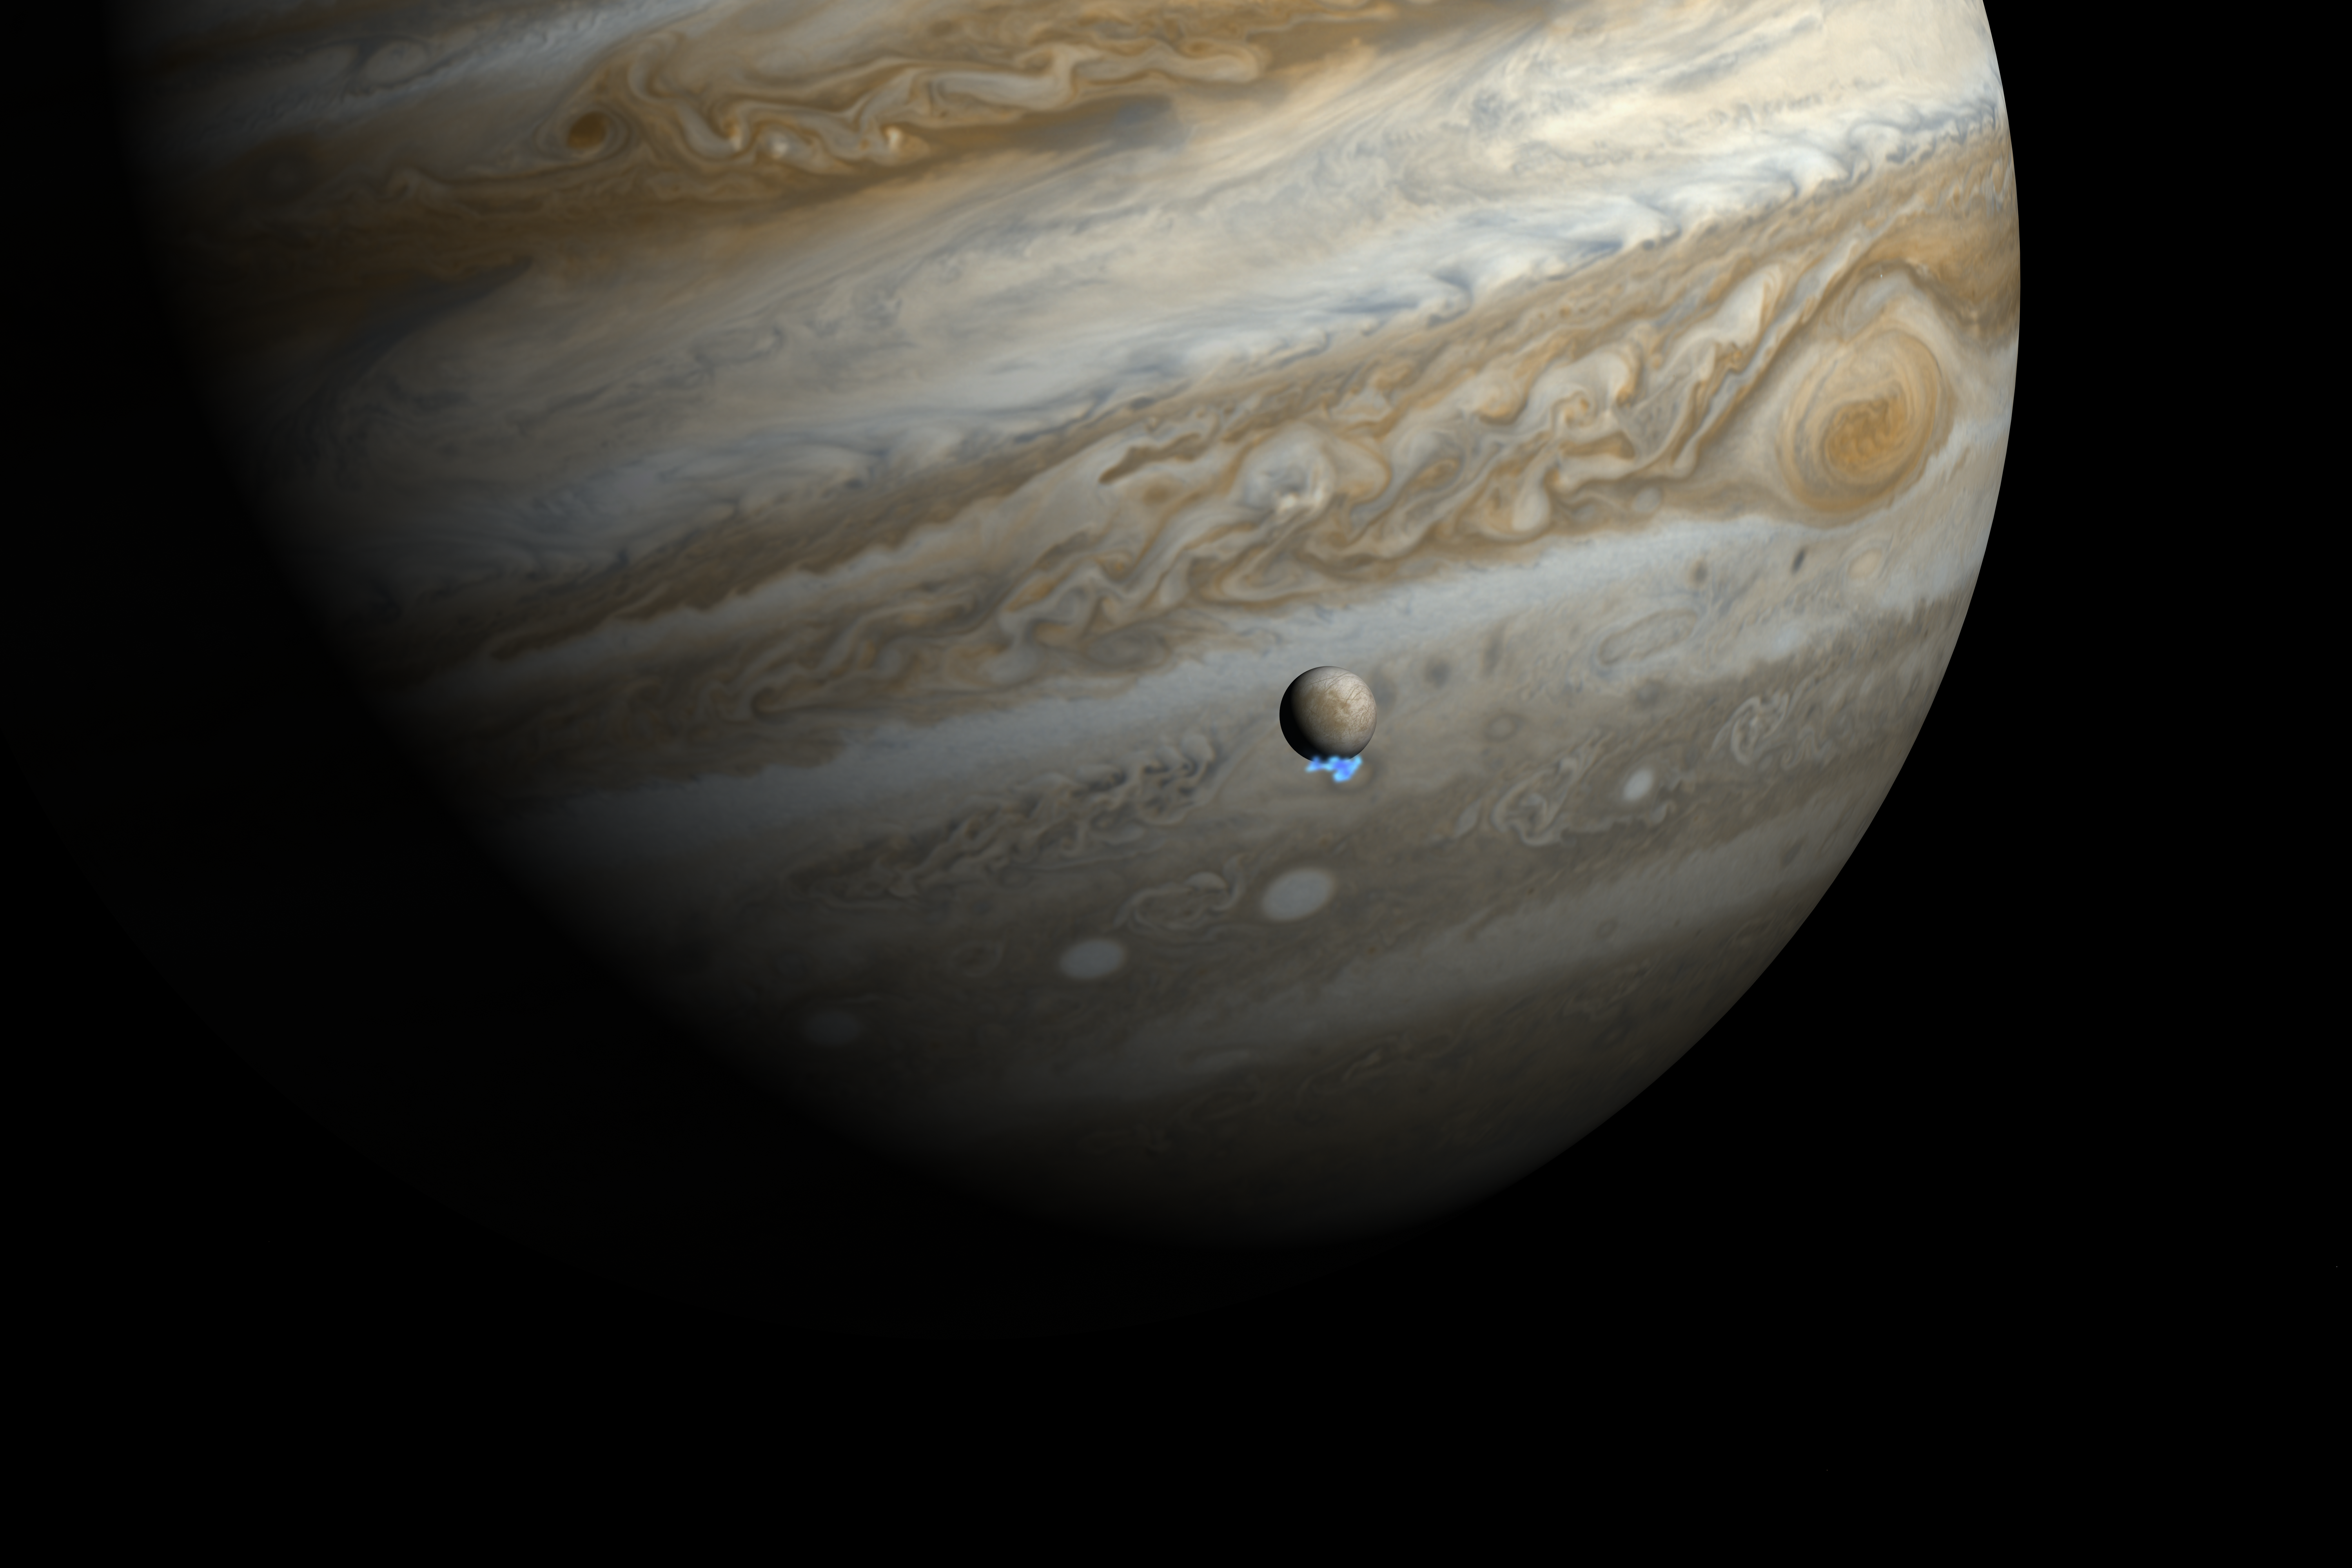

Water vapour plumes on Jupiter's moon Europa (artist's impression)

This artist's impression shows Jupiter and its moon Europa using actual Jupiter and Europa images in visible light. The Hubble ultraviolet images showing the faint emission from the water vapour plumes have been superimposed, respecting the size but not the brightness of the plumes.

Astronomers using Hubble have detected signs of water vapour being vented off this moon, creating variable plumes near its south pole — the first observational evidence of water vapour being ejected off the moon's surface.

Credit: NASA, ESA, and M. Kornmesser. Science Credit: NASA, ESA, L. Roth (Southwest Research Institute and University of Cologne, Germany), J. Saur (University of Cologne, Germany), K. Retherford (Southwest Research Institute), D. Strobel and P. Feldman (Johns Hopkins University), M. McGrath (Marshall Space Flight Center), and F. Nimmo (University of California, Santa Cruz)